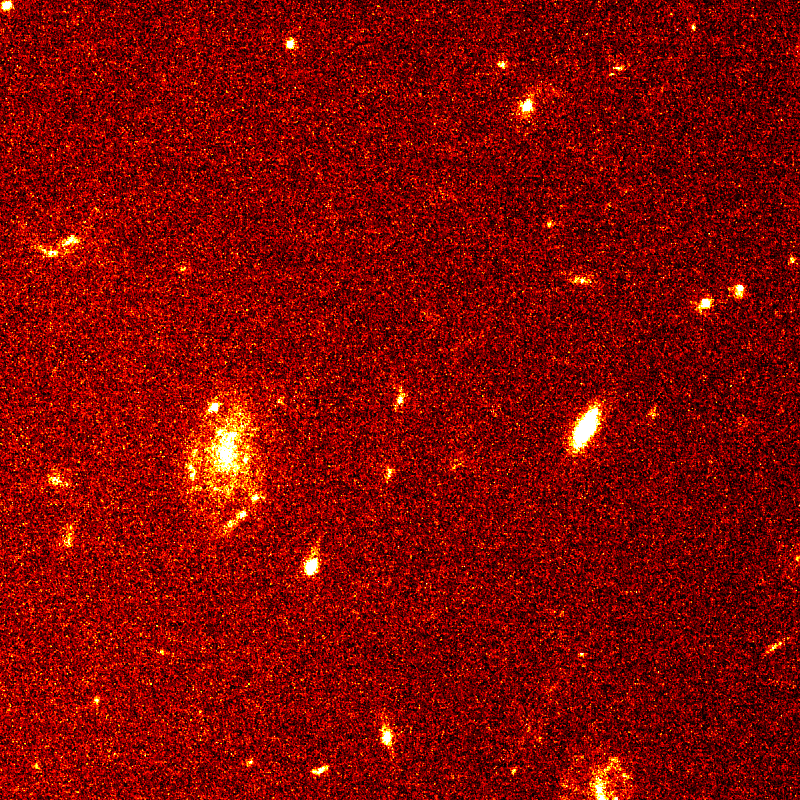

Gamma ray burst 971214

Image of the GRB 971214 field, obtained with the Hubble Space Telescope about four months after the burst, well after the afterglow has faded away. The extremely faint and distant galaxy (in the center) is the host galaxy of the gamma-ray burst. It was discovered earlier using the Keck 10-m telescope, but it is shown here as seen with a superior sharpness of the HST.

Credit: S. R. Kulkarni and S. G. Djorgovski (Caltech), the Caltech GRB Team, and NASA/ESA